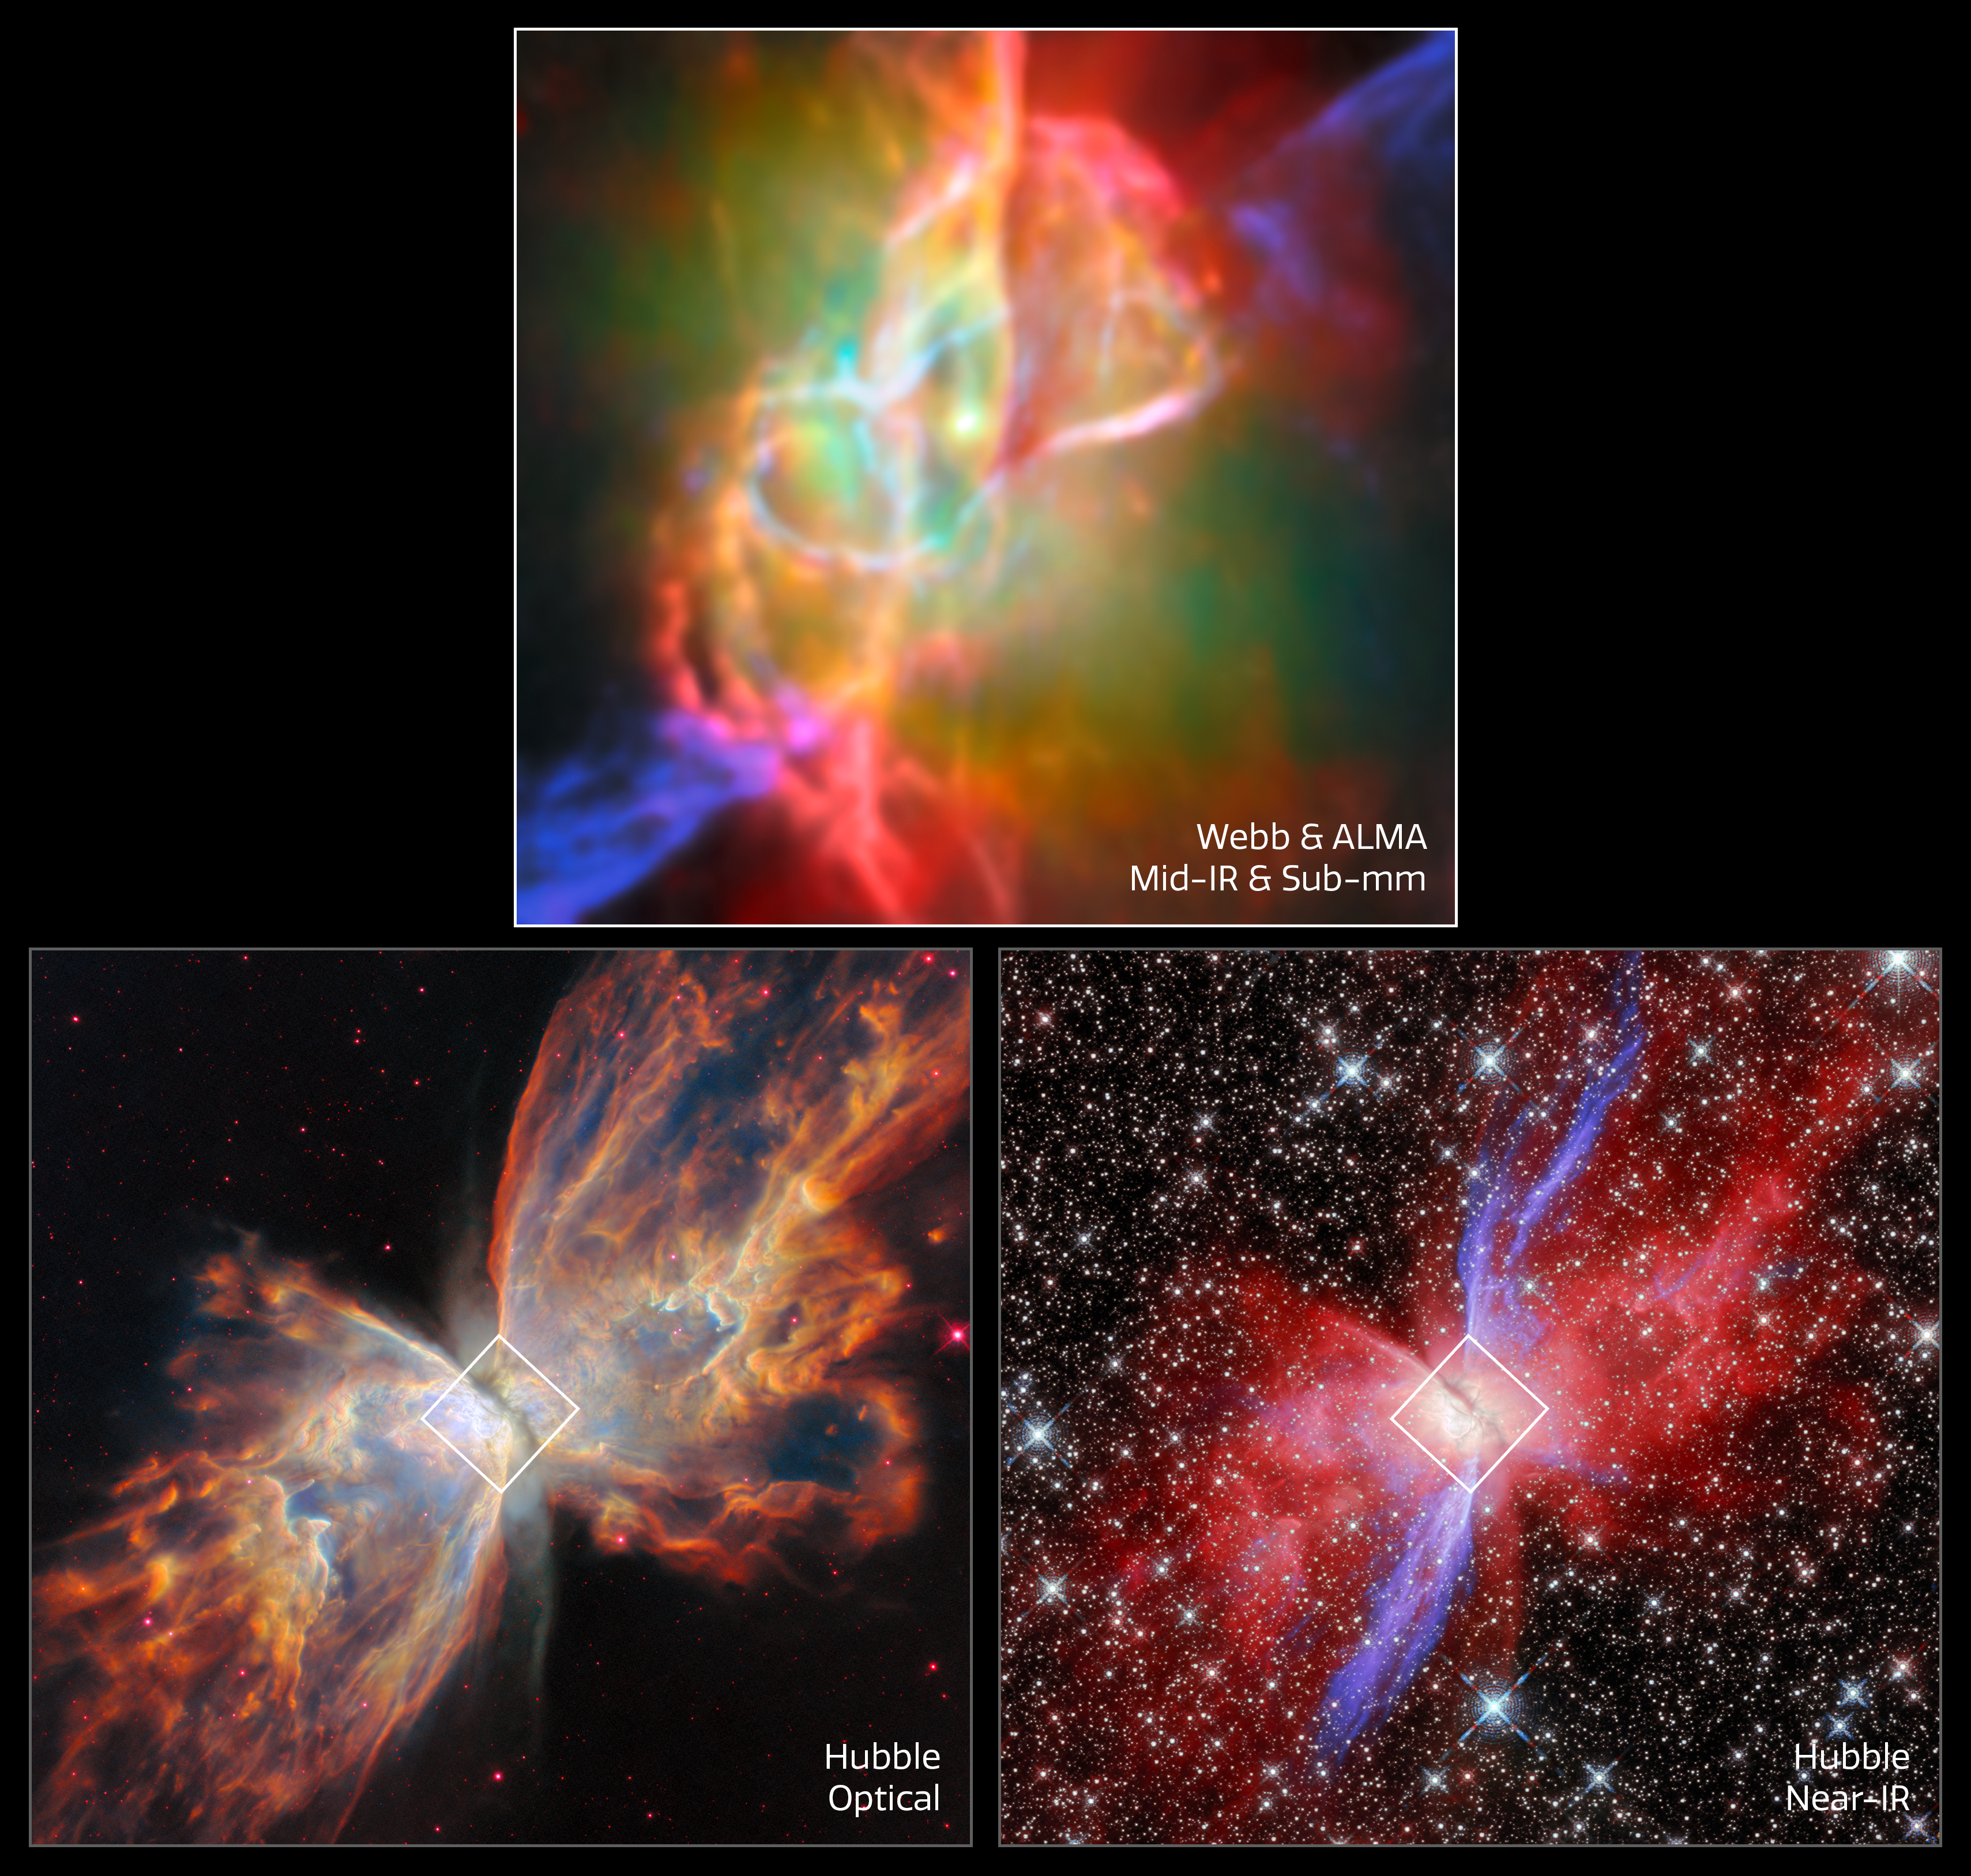

Butterfly Nebula NGC 6302 (Hubble and Webb + ALMA images, stacked)

This image set showcases three views of the Butterfly Nebula, also called NGC 6302. The Butterfly Nebula, located about 3400 light-years away in the constellation Scorpius, is one of the best-studied planetary nebulae in our galaxy.

Planetary nebulae are among the most beautiful and most elusive creatures in the cosmic zoo. These nebulae form when stars with masses between about 0.8 and 8 times the mass of the Sun shed most of their mass at the end of their lives. The planetary nebula phase is fleeting, lasting only about 20 000 years.

The Butterfly Nebula is a bipolar nebula, meaning that it has two lobes that spread in opposite directions, forming the ‘wings’ of the butterfly. A dark band of dusty gas poses as the butterfly’s ‘body’. This band is actually a doughnut-shaped torus that’s being viewed from the side, hiding the nebula’s central star - the ancient core of a Sun-like star that energises the nebula and causes it to glow. The dusty doughnut may be responsible for the nebula’s insectoid shape by preventing gas from flowing outward from the star equally in all directions.

The lower two images of the three images shown here highlight the bipolar nature of the Butterfly Nebula in optical and near-infrared light captured by the NASA/ESA Hubble Space Telescope. The upper image zooms in on the centre of the Butterfly Nebula and its dusty torus, providing an unprecedented view of its complex structure. The Webb data are supplemented with data from the Atacama Large Millimetre/submillimetre Array, a powerful network of radio dishes.

While the nebula’s central star is blanketed with thick, dusty gas at optical wavelengths, Webb’s infrared capabilities reveal the central star and show the doughnut-shaped torus and interconnected bubbles of dusty gas that surround it.

Credit: ESA/Webb, NASA & CSA, M. Matsuura, J. Kastner, K. Noll, ALMA (ESO/NAOJ/NRAO), N. Hirano, J. Kastner, M. Zamani (ESA/Webb)